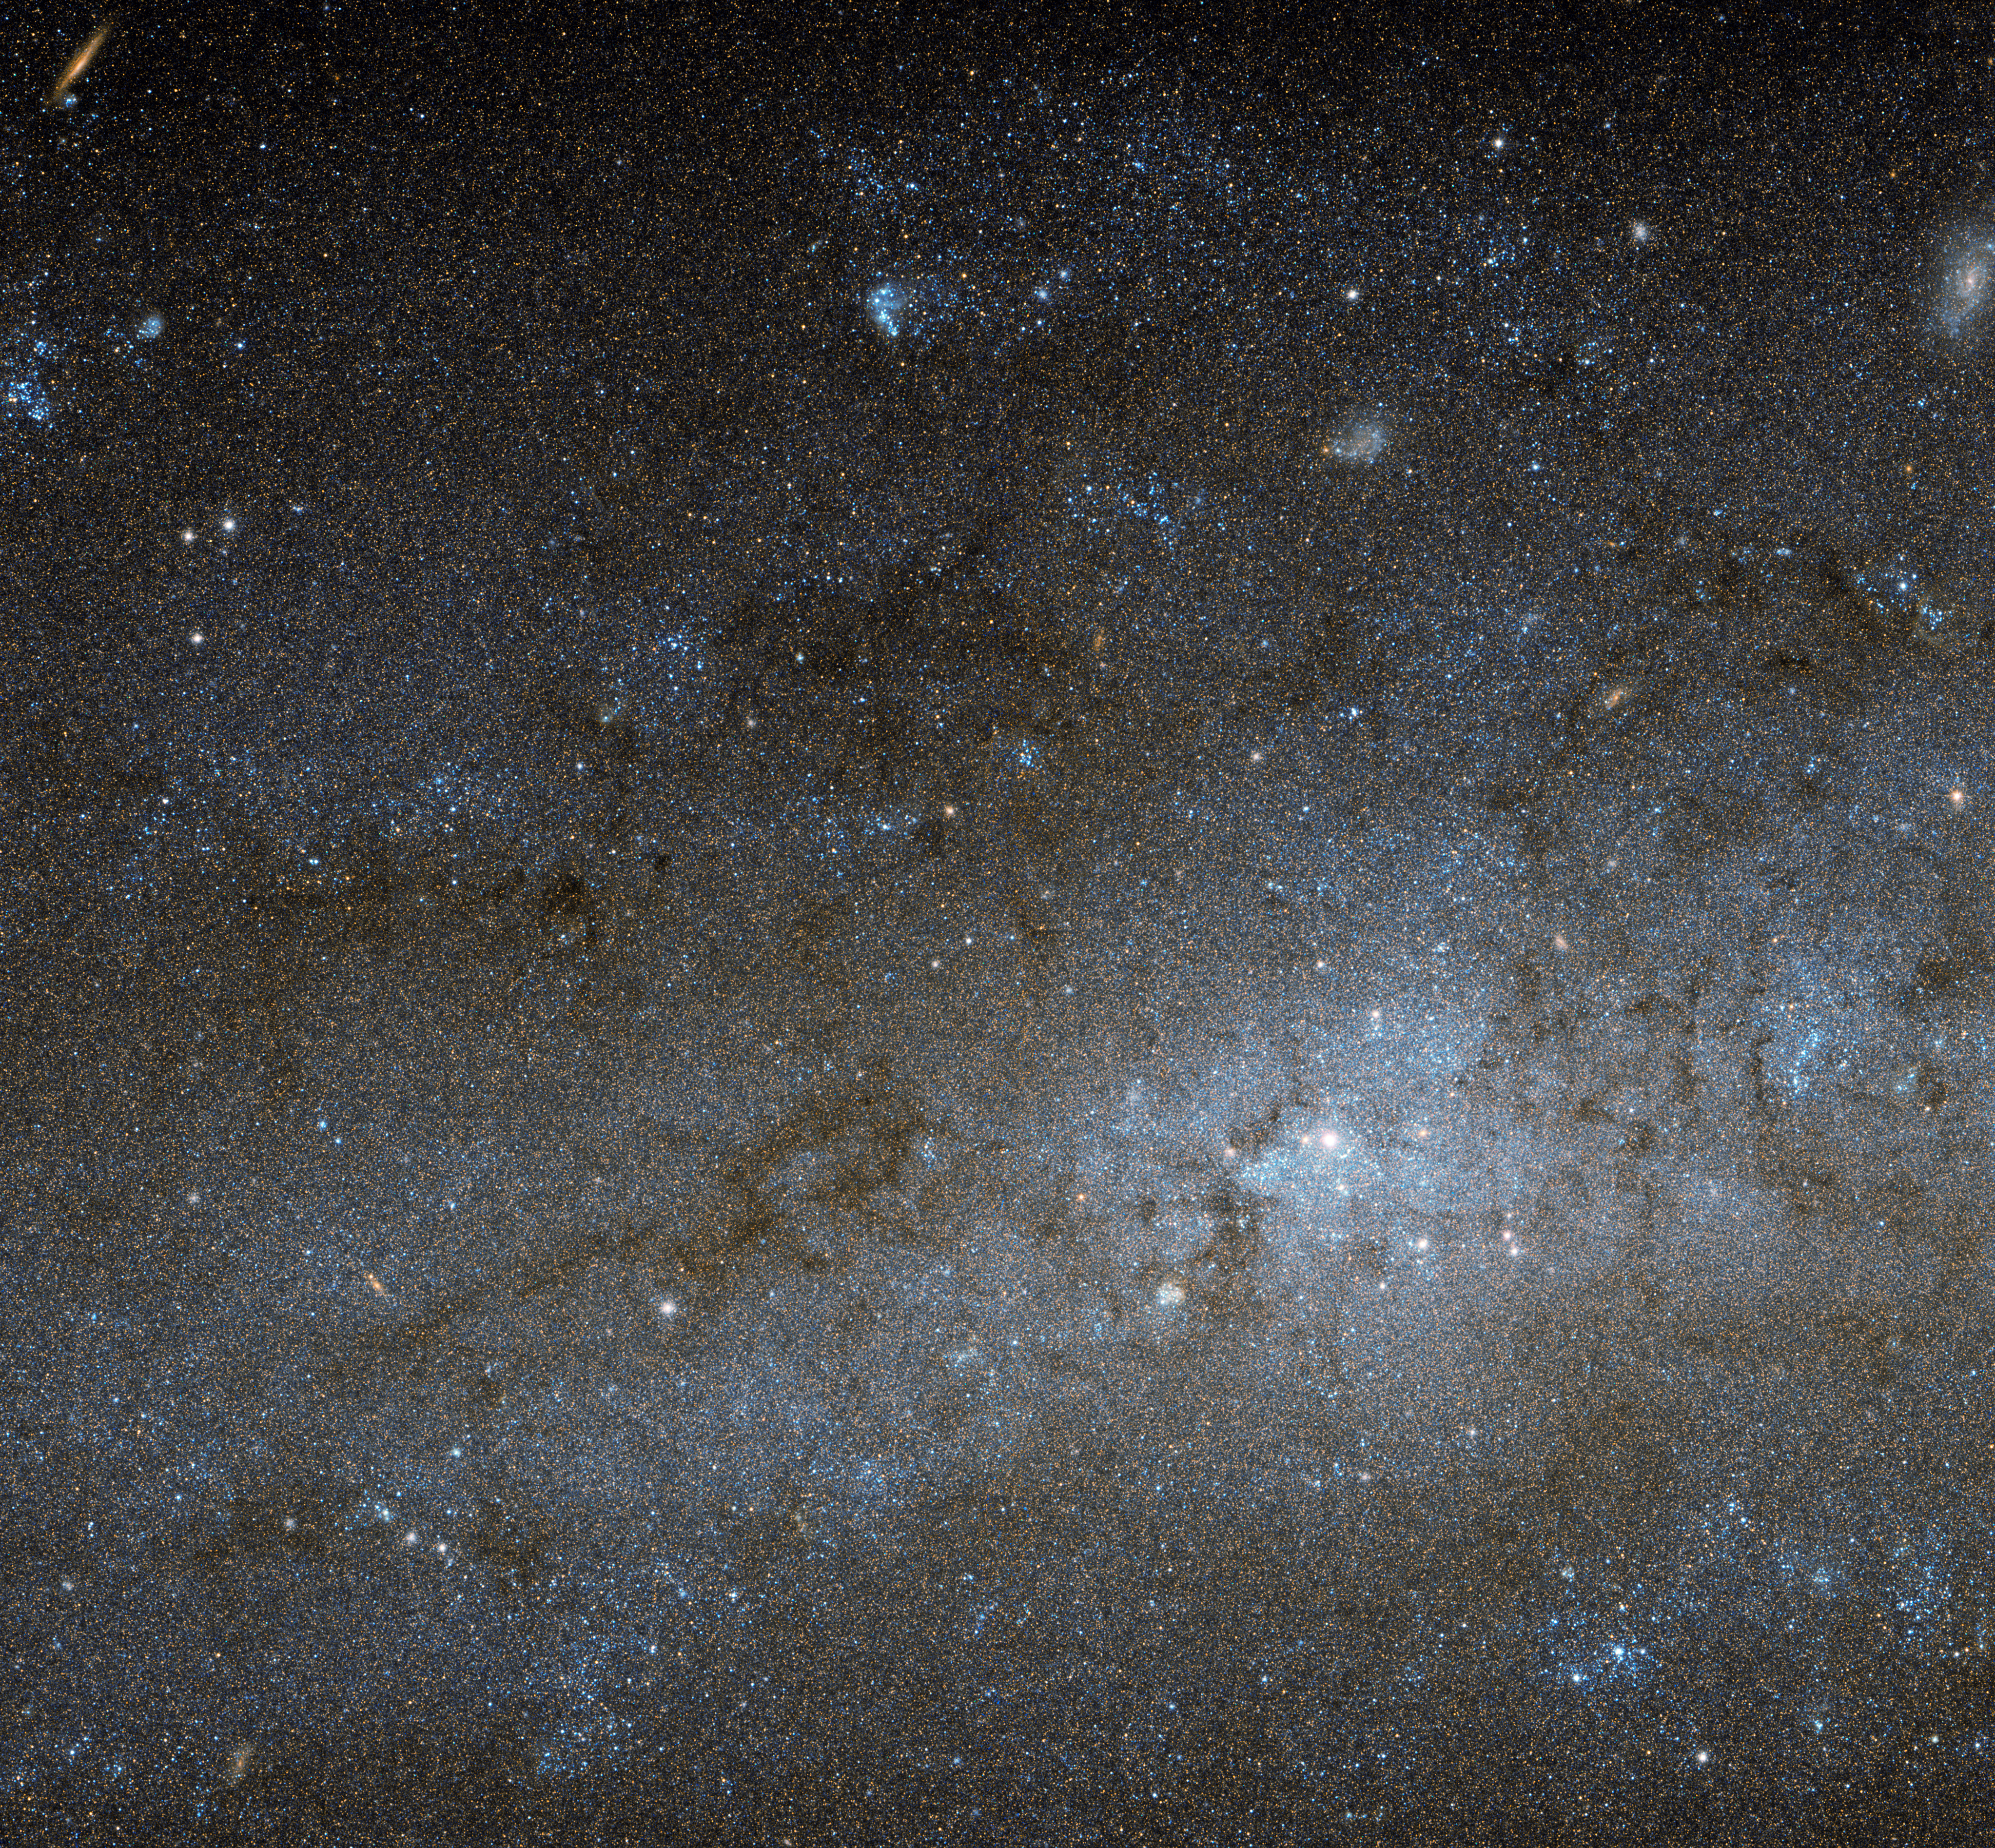

The centre of NGC 247

This Hubble image shows the central region of a spiral galaxy known as NGC 247. NGC 247 is a relatively small spiral galaxy in the southern constellation of Cetus (The Whale). Lying at a distance of around 11 million light-years from us, it forms part of the Sculptor Group, a loose collection of galaxies that also contains the more famous NGC 253 (otherwise known as the Sculptor Galaxy).

NGC 247’s nucleus is visible here as a bright, whitish patch, surrounded by a mixture of stars, gas and dust. The dust forms dark patches and filaments that are silhouetted against the background of stars, while the gas has formed into bright knots known as H II regions, mostly scattered throughout the galaxy’s arms and outer areas.

This galaxy displays one particularly unusual and mysterious feature — it is not visible in this image, but can be seen clearly in wider views of the galaxy, such as this picture from ESO’s MPG/ESO 2.2-metre telescope. The northern part of NGC 247’s disc hosts an apparent void, a gap in the usual swarm of stars and H II regions that spans almost a third of the galaxy’s total length.

There are stars within this void, but they are quite different from those around it. They are significantly older, and as a result much fainter and redder. This indicates that the star formation taking place across most of the galaxy’s disc has somehow been arrested in the void region, and has not taken place for around one billion years. Although astronomers are still unsure how the void formed, recent studies suggest it might have been caused by gravitational interactions with part of another galaxy.

Credit: ESA/Hubble & NASA